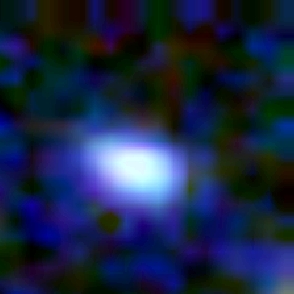

Galaxy building blocks

This is one Proto Galaxy out of a series of 18, taken by the Wide Field Planetary Camera 2.

Credit: Rogier Windhorst and Sam Pascarelle (Arizona State University) and NASA/ESA